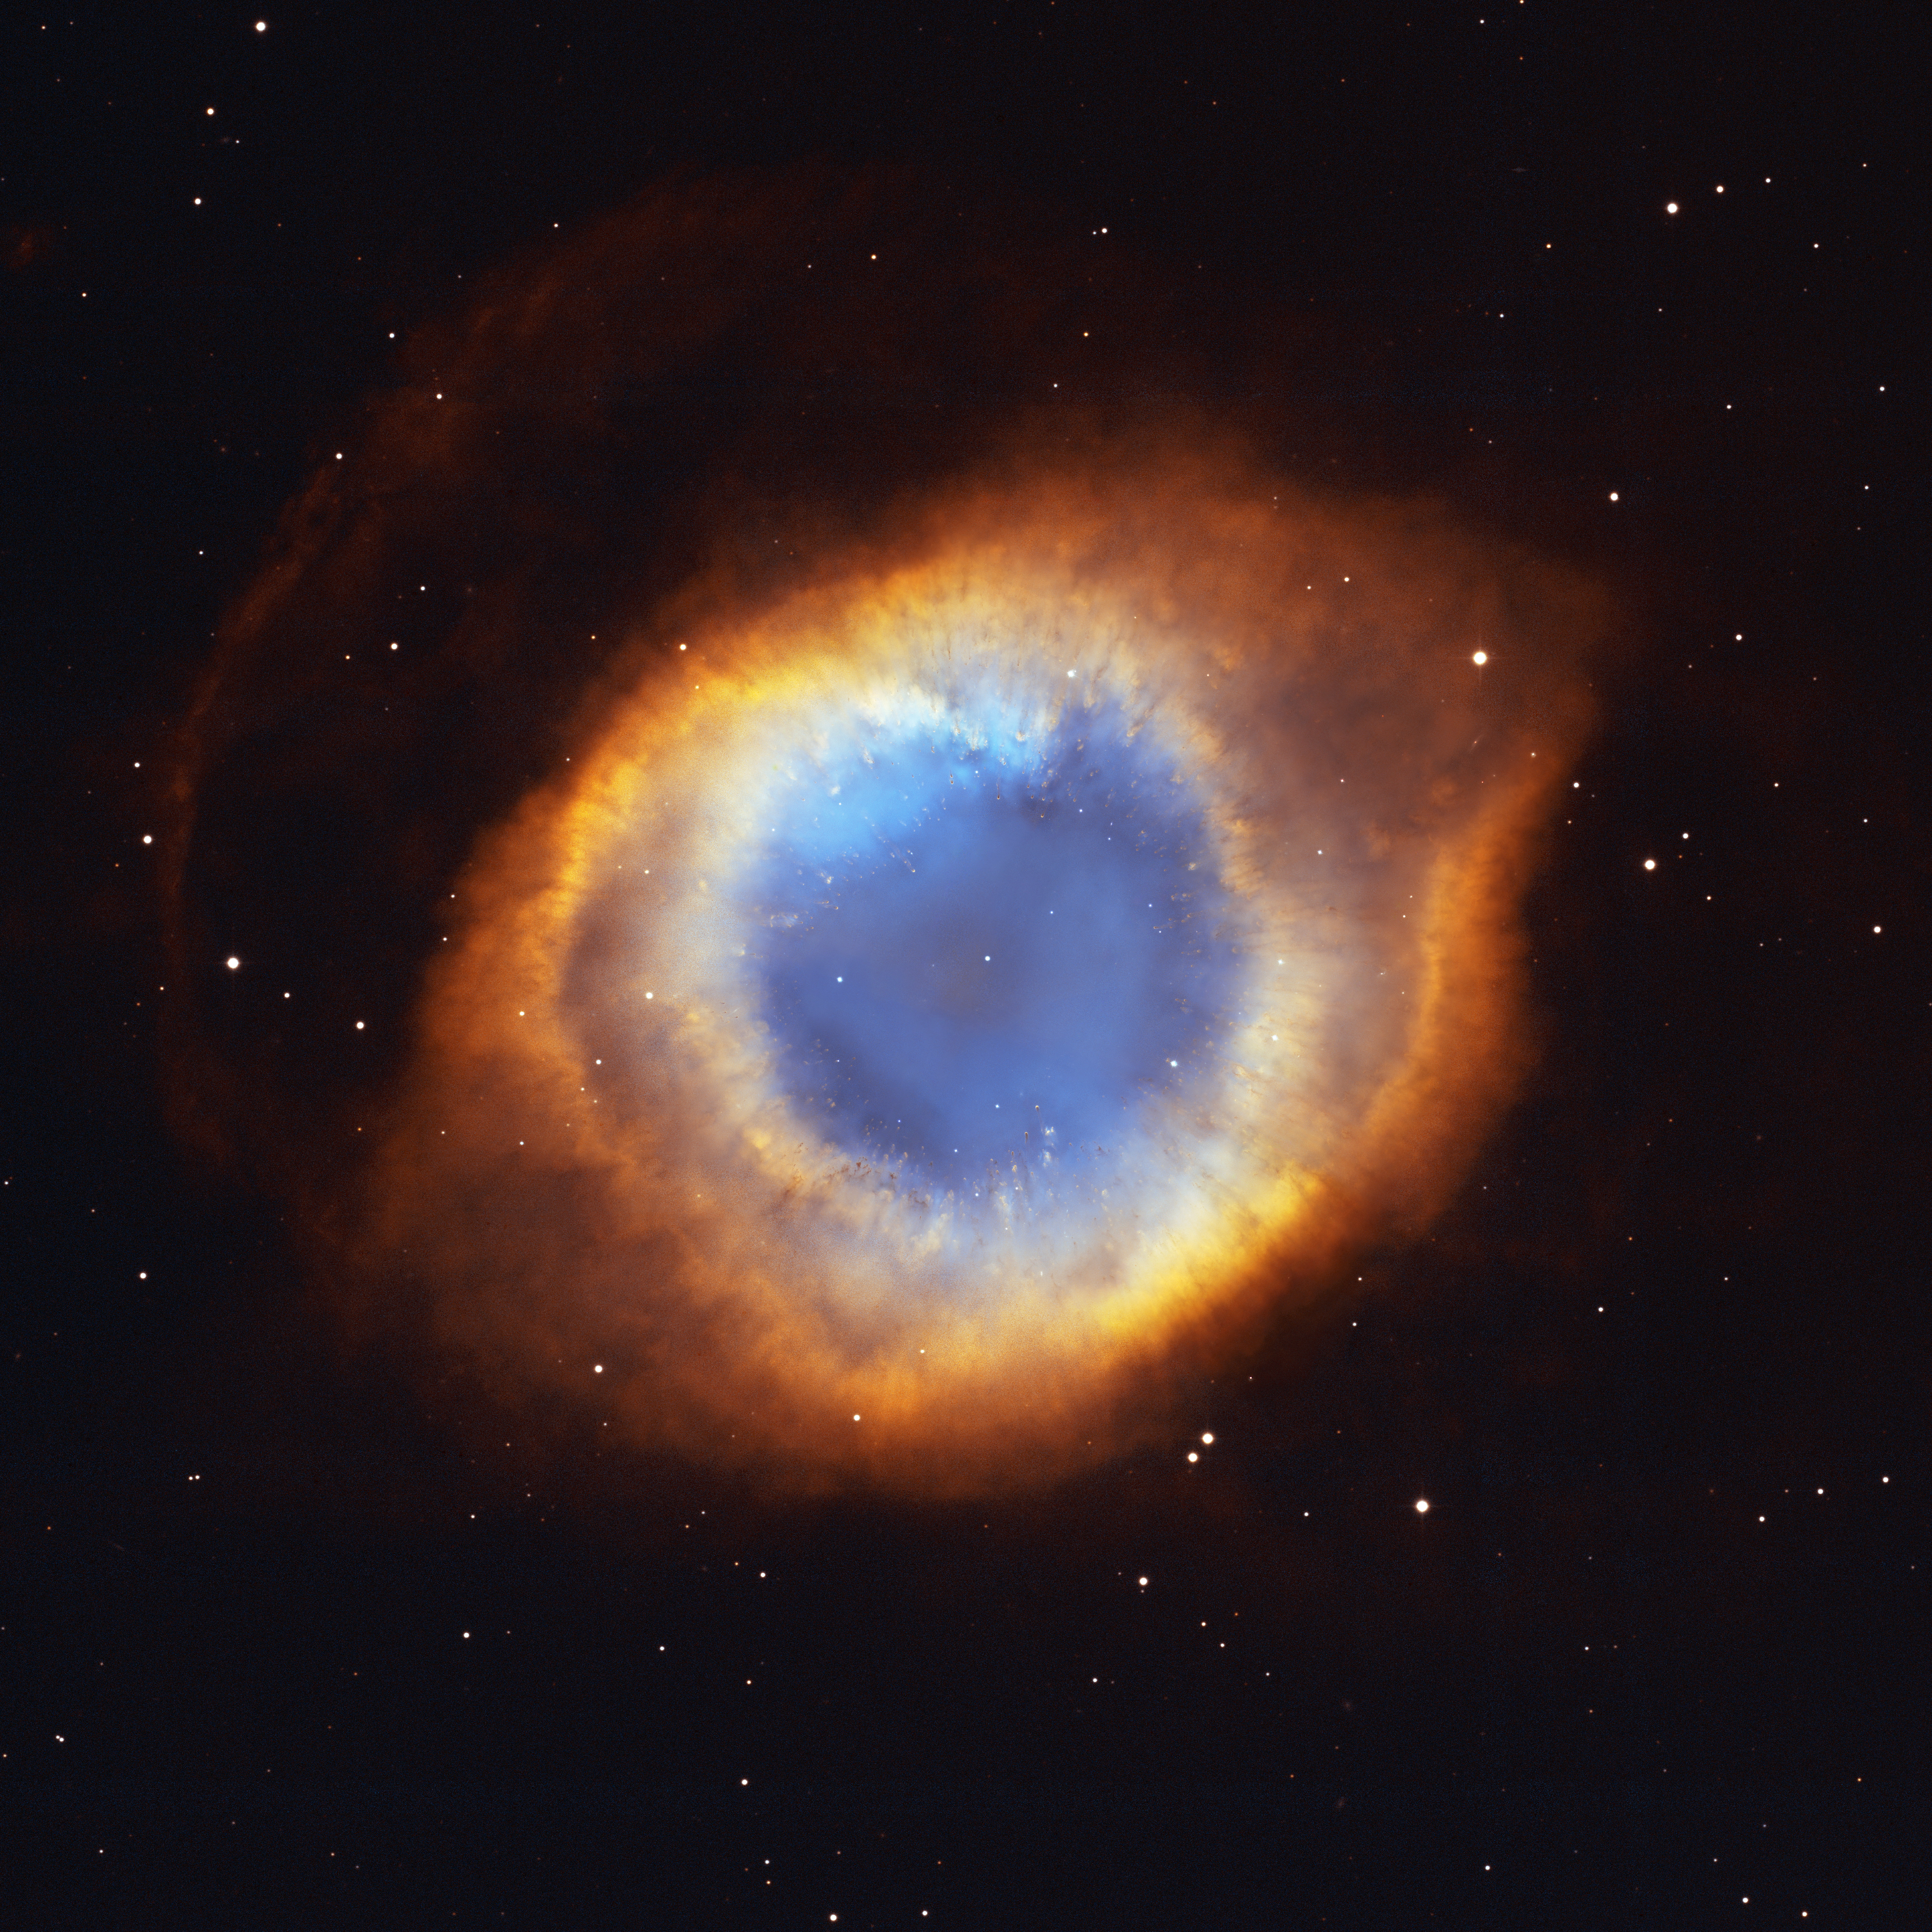

Iridescent Glory of Nearby Planetary Nebula Showcased on Astronomy Day

In one of the largest and most detailed celestial images ever made, the coil-shaped Helix Nebula is being unveiled tomorrow in celebration of Astronomy Day (Saturday, May 10).

The composite picture is a seamless blend of ultra-sharp NASA/ESA Hubble Space Telescope HST) images combined with the wide view of the Mosaic Camera on the National Science Foundation's 0.9-meter telescope at Kitt Peak National Observatory, part of the National Optical Astronomy Observatory, near Tucson, Ariz. Astronomers at the Space Telescope Science Institute assembled these images into a mosaic. The mosaic was then blended with a wider photograph taken by the Mosaic Camera. The image shows a fine web of filamentary "bicycle-spoke" features embedded in the colorful red and blue gas ring, which is one of the nearest planetary nebulae to Earth.

Because the nebula is nearby, it appears as nearly one-half the diameter of the full Moon. This required HST astronomers to take several exposures with the Advanced Camera for Surveys to capture most of the Helix. HST views were then blended with a wider photo taken by the Mosaic Camera. The portrait offers a dizzying look down what is actually a trillion-mile-long tunnel of glowing gases. The fluorescing tube is pointed nearly directly at Earth, so it looks more like a bubble than a cylinder. A forest of thousands of comet-like filaments, embedded along the inner rim of the nebula, points back toward the central star, which is a small, super-hot white dwarf.

The tentacles formed when a hot "stellar wind" of gas plowed into colder shells of dust and gas ejected previously by the doomed star. Ground-based telescopes have seen these comet-like filaments for decades, but never before in such detail. The filaments may actually lie in a disk encircling the hot star, like a collar. The radiant tie-die colours correspond to glowing oxygen (blue) and hydrogen and nitrogen (red).

Valuable Hubble observing time became available during the November 2002 Leonid meteor storm. To protect the spacecraft, including HST's precise mirror, controllers turned the aft end into the direction of the meteor stream for about half a day. Fortunately, the Helix Nebula was almost exactly in the opposite direction of the meteor stream, so Hubble used nine orbits to photograph the nebula while it waited out the storm. To capture the sprawling nebula, Hubble had to take nine separate snapshots.

Planetary nebulae like the Helix are sculpted late in a Sun-like star's life by a torrential gush of gases escaping from the dying star. They have nothing to do with planet formation, but got their name because they look like planetary disks when viewed through a small telescope. With higher magnification, the classic "donut-hole" in the middle of a planetary nebula can be resolved. Based on the nebula's distance of 650 light-years, its angular size corresponds to a huge ring with a diameter of nearly 3 light-years. That's approximately three-quarters of the distance between our Sun and the nearest star.

The Helix Nebula is a popular target of amateur astronomers and can be seen with binoculars as a ghostly, greenish cloud in the constellation Aquarius. Larger amateur telescopes can resolve the ring-shaped nebula, but only the largest ground-based telescopes can resolve the radial streaks. After careful analysis, astronomers concluded the nebula really isn't a bubble, but is a cylinder that happens to be pointed toward Earth.

Credit: NASA, NOAO, ESA, the Hubble Helix Nebula Team, M. Meixner (STScI), and T.A. Rector (NRAO).